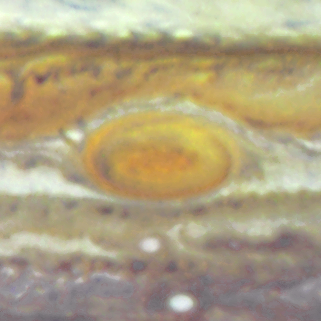

Jupiter's Great Red Spot

When 17th-century astronomers first turned their telescopes to Jupiter, they noted a conspicuous reddish spot on the giant planet. This Great Red Spot is still present in Jupiter's atmosphere, more than 300 years later. It is now known that it is a vast storm, spinning like a cyclone. Unlike a low-pressure hurricane in the Caribbean Sea, however, the Red Spot rotates in a counterclockwise direction in the southern hemisphere, showing that it is a high-pressure system. Winds inside this Jovian storm reach speeds of about 270 mph.

Credit: Hubble Heritage Team (STScI/AURA/NASA/ESA) and Amy Simon (Cornell U.)